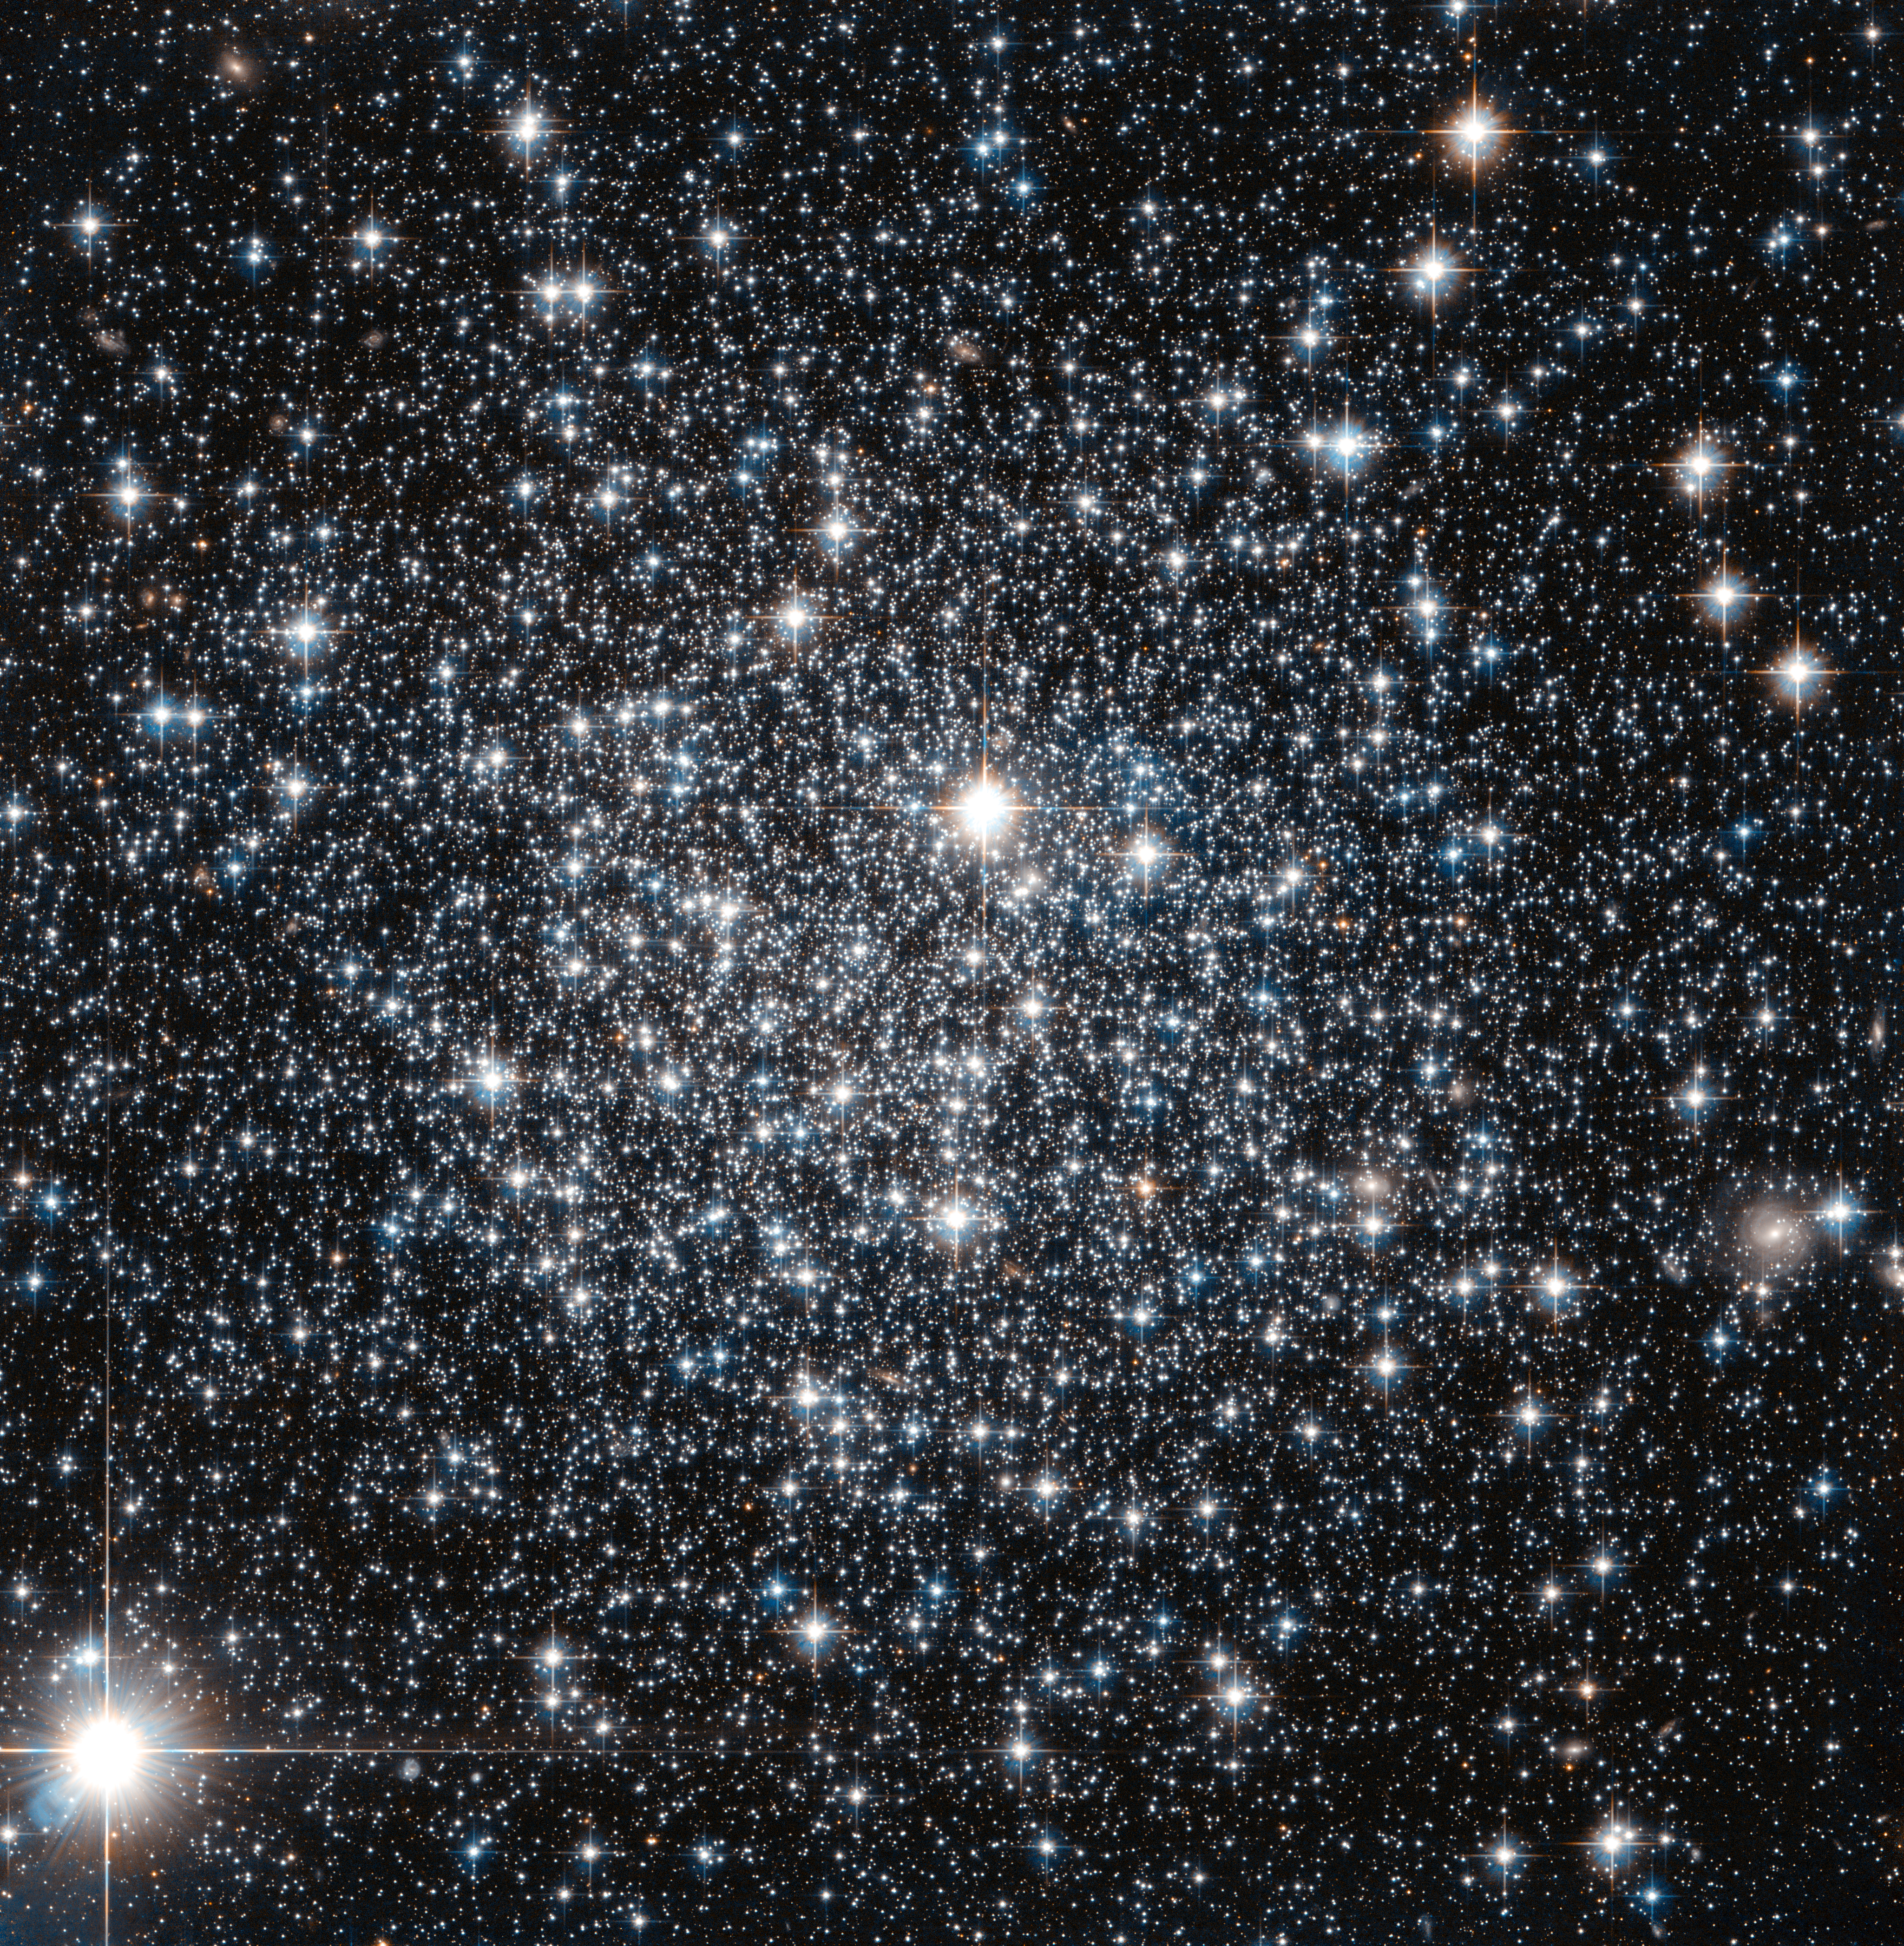

IC 4499: A globular cluster’s age revisited

This new NASA/ESA Hubble Space Telescope image shows the globular cluster IC 4499.

Globular clusters are big balls of old stars that orbit around their host galaxy. It has long been believed that all the stars within a globular cluster form at the about same time, a property which can be used to determine the cluster's age. For more massive globulars however, detailed observations have shown that this is not entirely true — there is evidence that they instead consist of multiple populations of stars born at different times. One of the driving forces behind this behaviour is thought to be gravity: more massive globulars manage to grab more gas and dust, which can then be transformed into new stars.

IC 4499 is a somewhat special case. Its mass lies somewhere between low-mass globulars, which show a single generation build-up, and the more complex and massive globulars which can contain more than one generation of stars. By studying objects like IC 4499 astronomers can therefore explore how mass affects a cluster's contents. Astronomers found no sign of multiple generations of stars in IC 4499 — supporting the idea that less massive clusters in general only consist of a single stellar generation.

Hubble observations of IC 4499 have also helped to pinpoint the cluster's age: observations of this cluster from the 1990s suggested a puzzlingly young age when compared to other globular clusters within the Milky Way. However, since those first estimates new Hubble data been obtained, and it has been found to be much more likely that IC 4499 is actually roughly the same age as other Milky Way clusters at approximately 12 billion years old.

Credit: ESA/Hubble & NASA